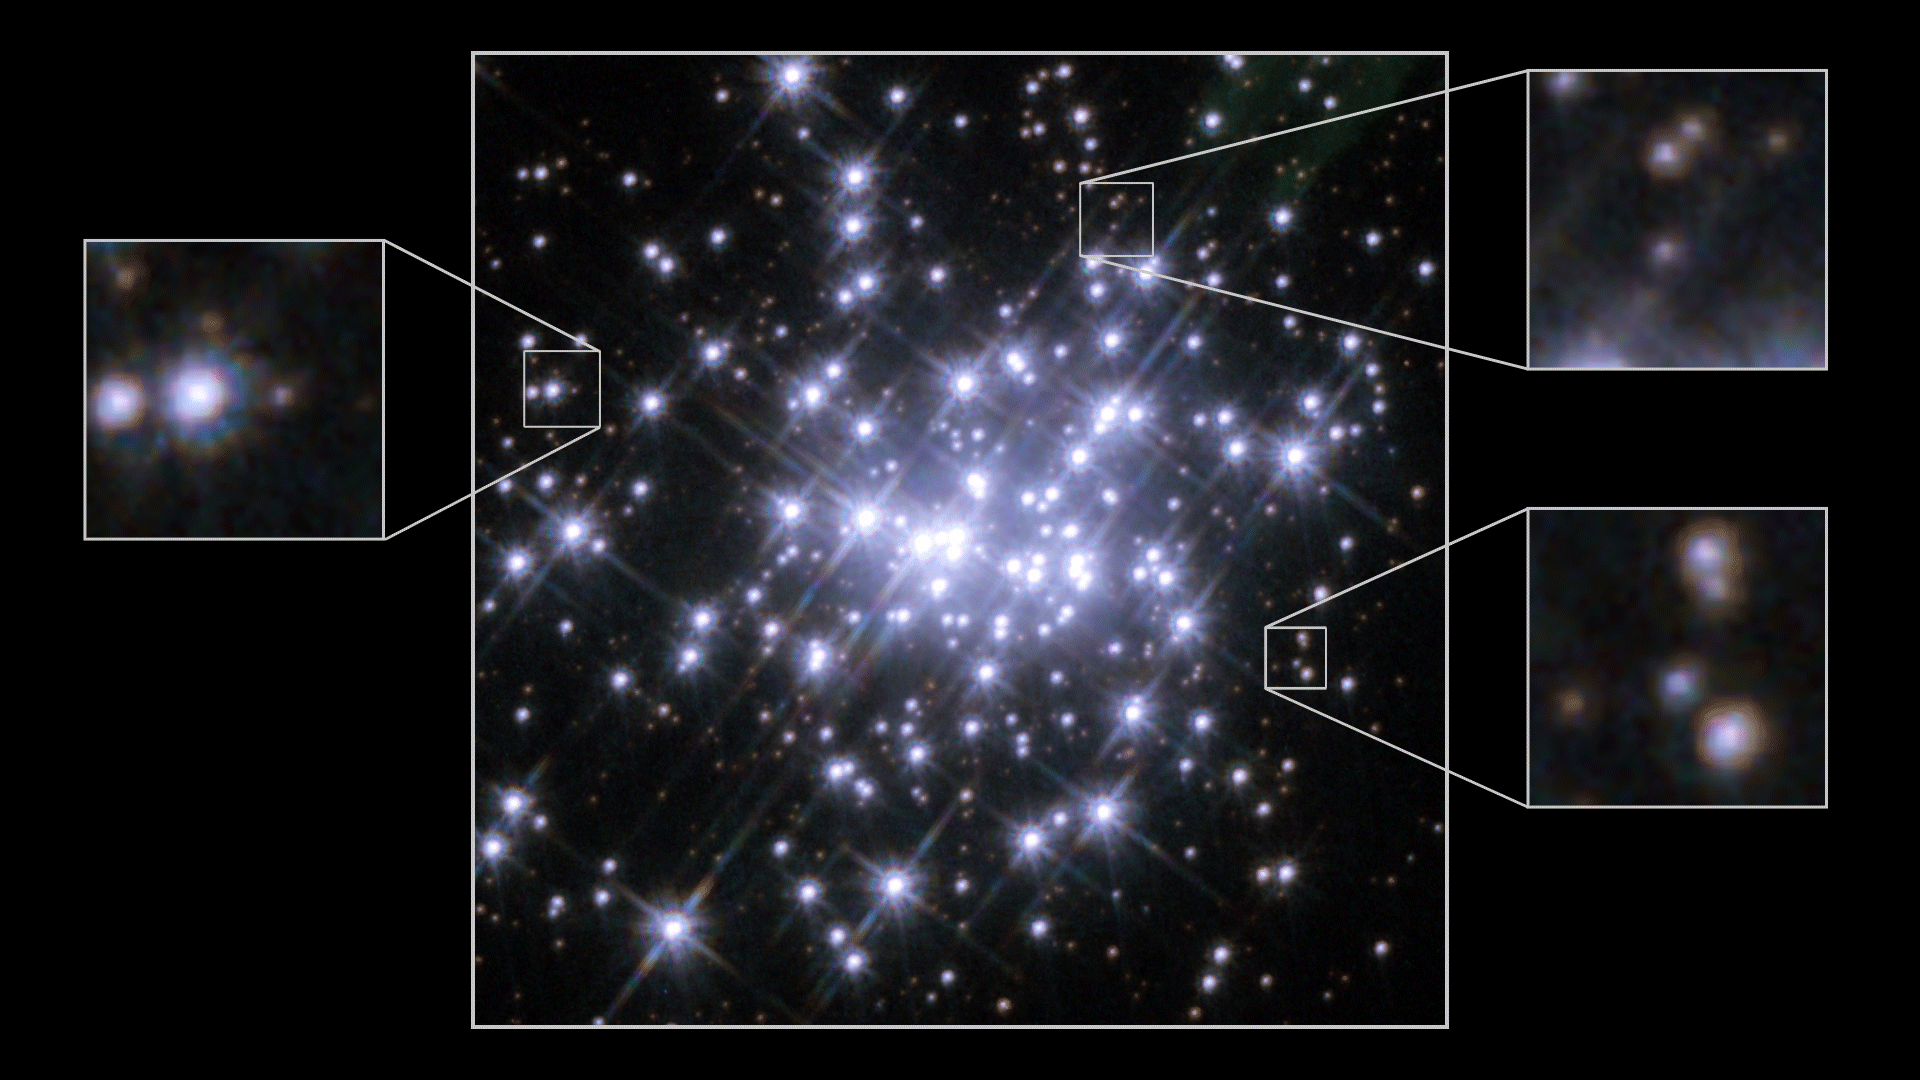

Comparison of Hubble observations of the massive compact star cluster in NGC 3603 in 1997 and 2007

The massive compact star cluster in NGC 3603 is shown in images taken ten years apart. The image is a colour composite of observations in the WFPC2 filters F547M (1997) respectively F555W (2007) (blue), F675W (green) and F814W (red). The field of view is about 20 arcseconds across. The boxes show a zoomed view of three foreground stars with a particularly high apparent speed relative to the cluster members. Other fast-moving stars can be spotted by closer examination of the two pictures. Most of the cluster stars move by less than 1/10 of a pixel over the ten-year period, which is not discernible by eye.

To blink between the two images and see the stars move please click on the 'Fullsize Original' link to the right or here.

Credit: NASA, ESA and Wolfgang Brandner (MPIA), Boyke Rochau (MPIA) and Andrea Stolte (University of Cologne)